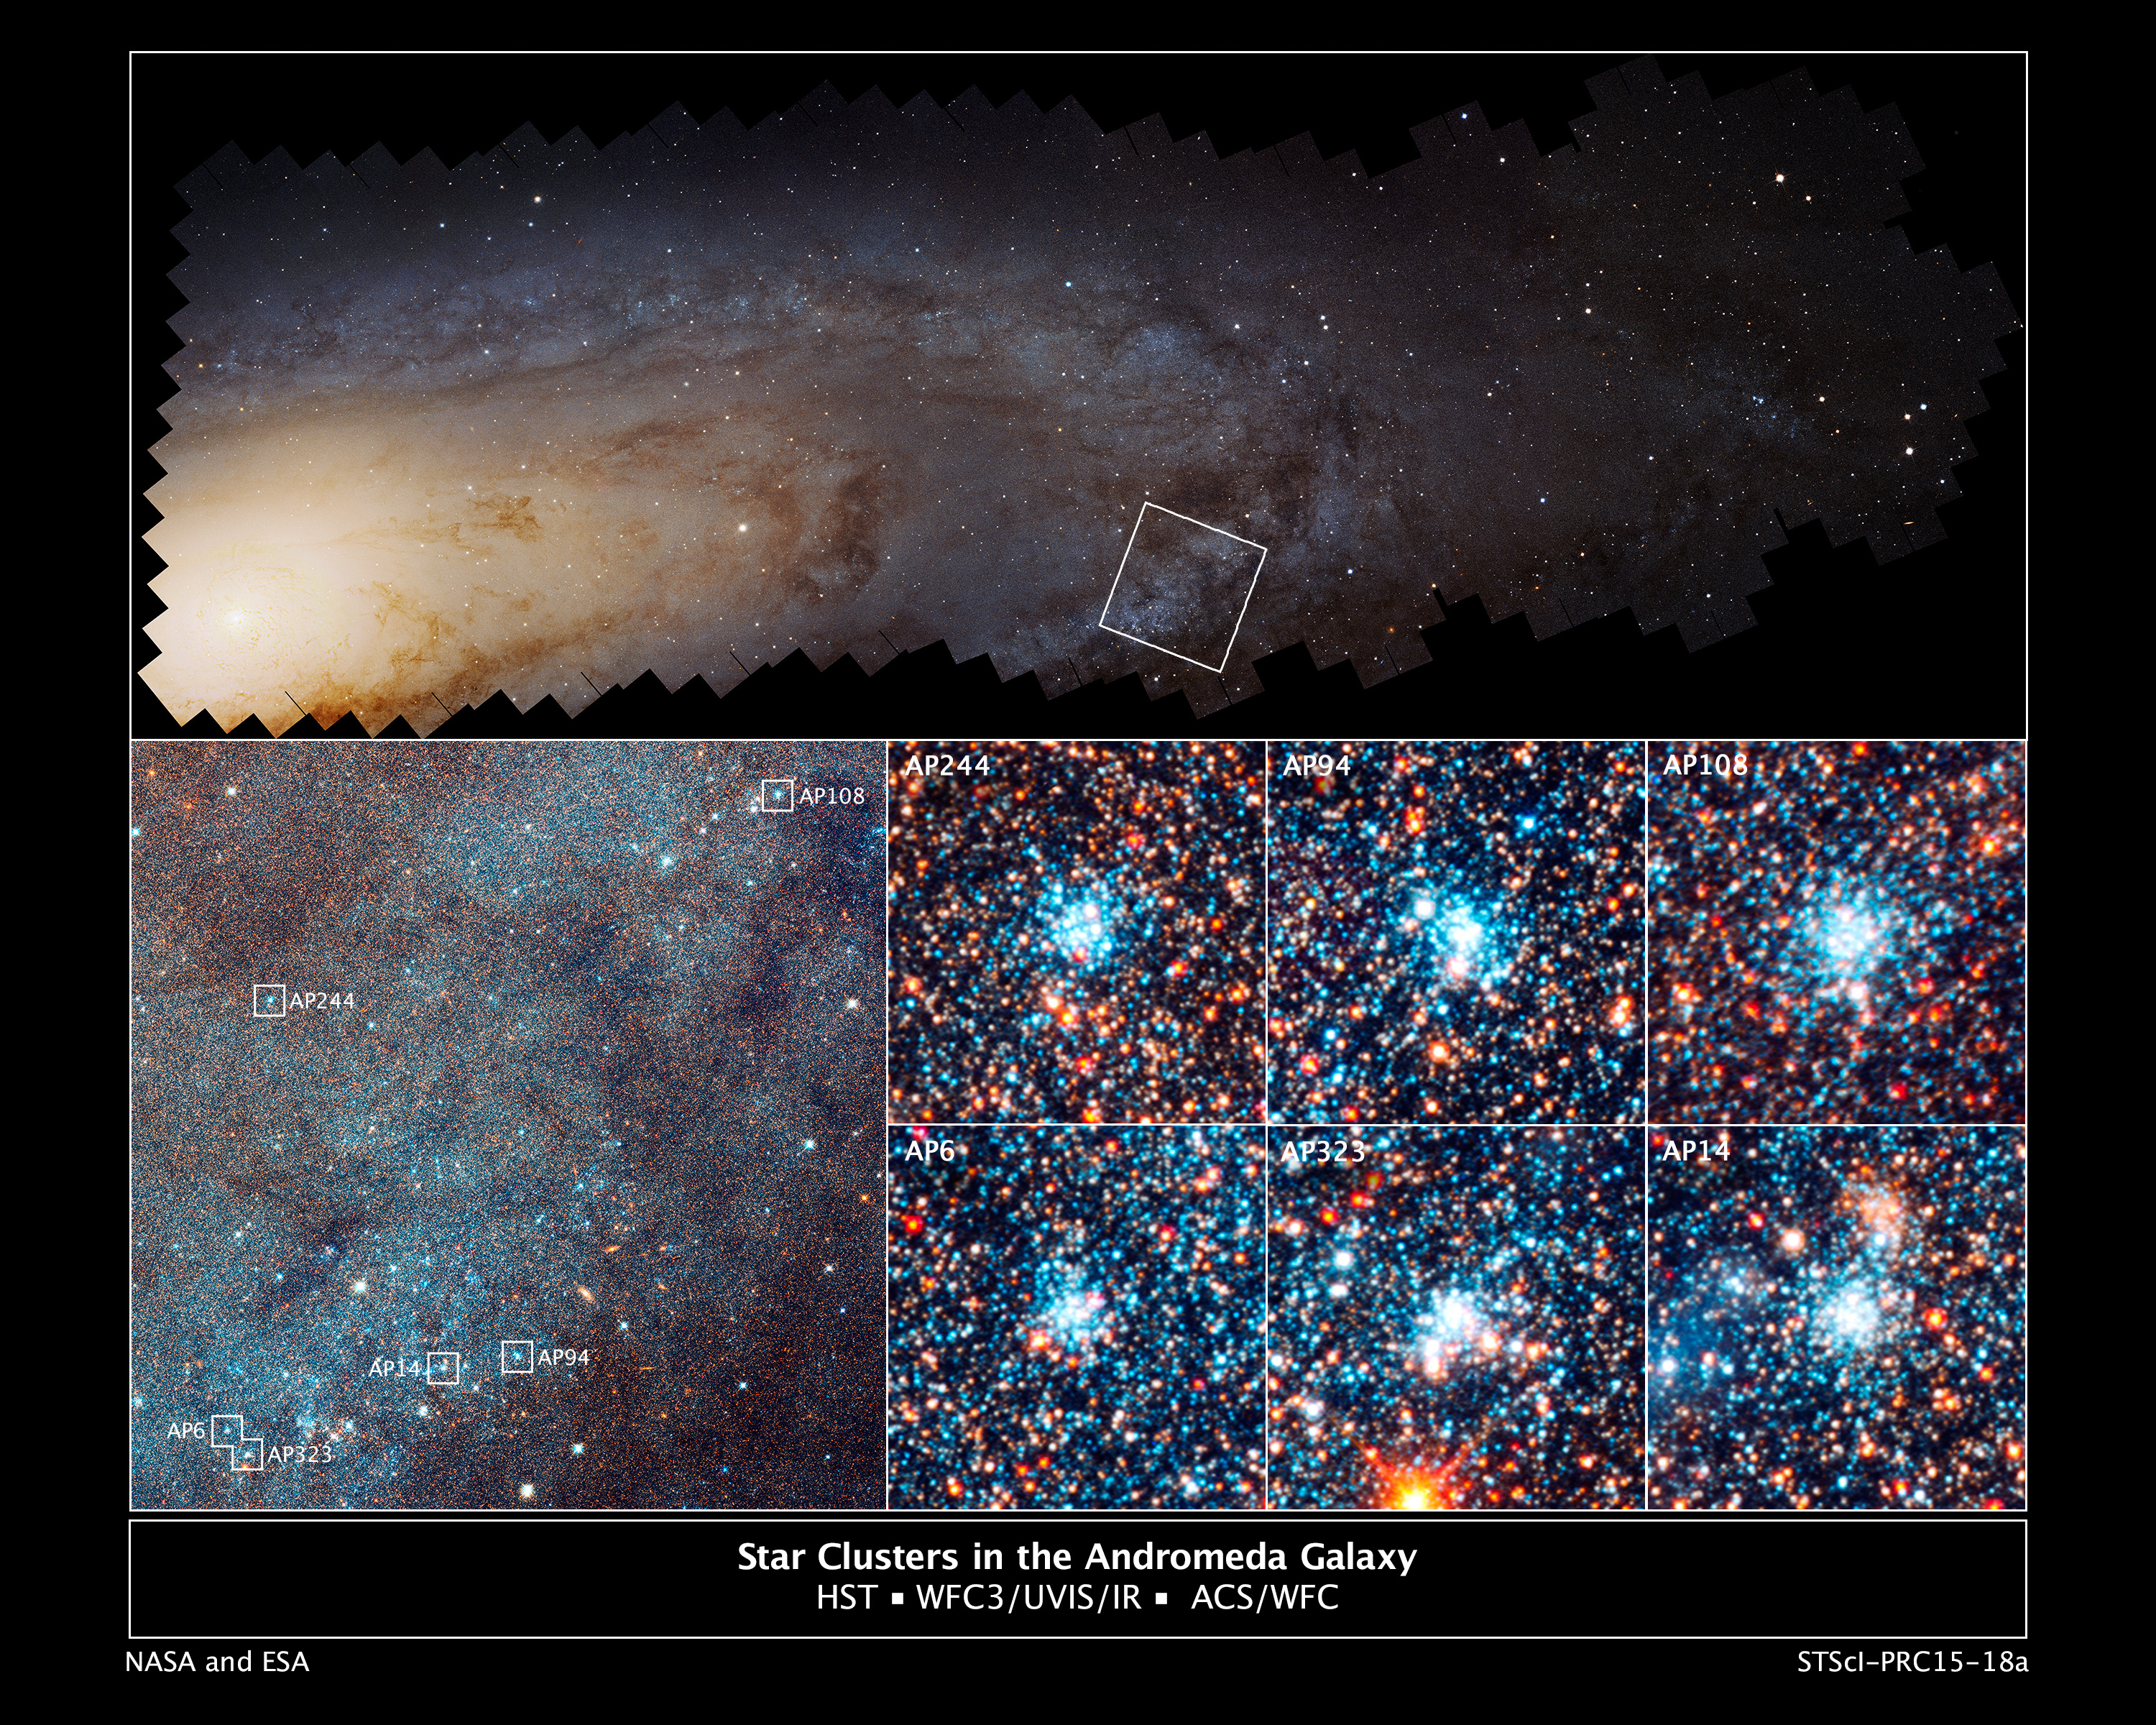

Star cluster in the Andromeda galaxy

[Top] - This is a Hubble Space Telescope mosaic of 414 photographs of the nearest major galaxy to our Milky Way galaxy, the Andromeda galaxy (M31). The vast panorama was assembled from nearly 8,000 separate exposures taken in near-ultraviolet, visible, and near-infrared light. Embedded within this view are 2,753 star clusters. The view is 61,600 light-years across and contains images of 117 million stars in the galaxy's disk.

[Bottom-Left] - An enlargement of the boxed field in the top image reveals myriad stars and numerous open star clusters as bright blue knots. Hubble's bird's-eye view of M31 allowed astronomers to conduct a larger-than-ever sampling of star clusters that are all at the same distance from Earth, 2.5 million light-years. The view is 4,400 light-years across.

[Bottom-Right] - This is a view of six bright blue clusters extracted from the field. Hubble astronomers discovered that, for whatever reason, nature apparently cooks up stars with a consistent distribution from massive stars to small stars (blue supergiants to red dwarfs). This remains a constant across the galaxy, despite the fact that the clusters vary in mass by a factor of 10 and range in age from 4 million to 24 million years old. Each cluster square is 150 light-years across.

Credit: NASA, ESA, J. Dalcanton, B.F. Williams, and L.C. Johnson (University of Washington), the PHAT team, and R. Gendler